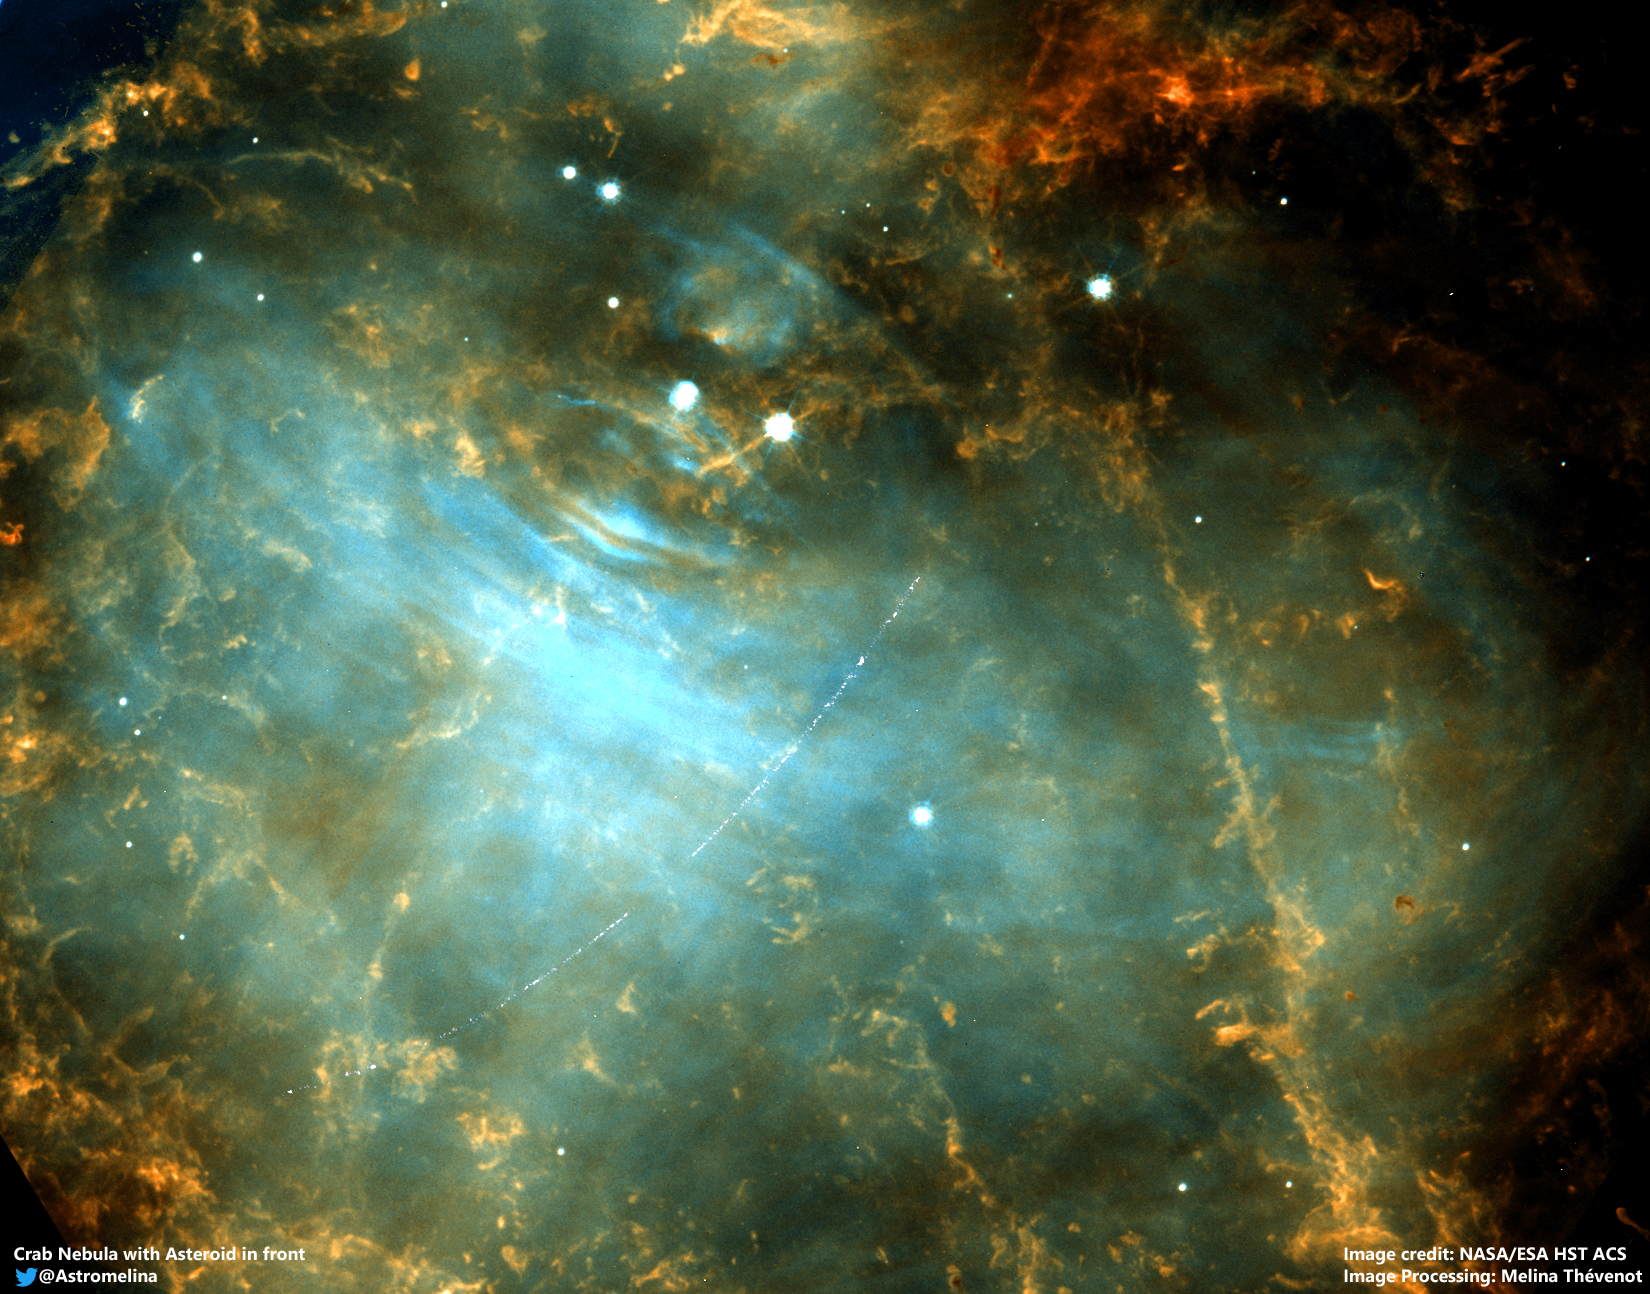

Asteroid in the Crab Nebula (M1)

Citizen scientist spots main-belt asteroid 2001 SE101 passing in front of the Crab Nebula (M1). Colour composition using HST ACS/WFC F550M and F606W filters.

Credit: ESA/Hubble, M. Thévenot (@AstroMelina)